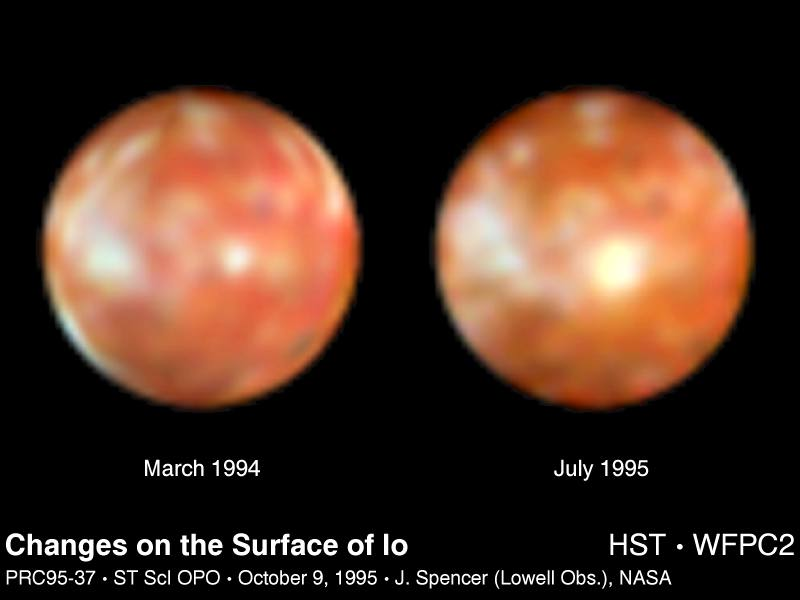

Changes on the Surface of Io

This Hubble Space Telescope pair of images of Jupiter's volcanic moon Io shows the surprising emergence of a 200-mile diameter large yellowish-white feature near the center of the moon's disk (photo on the right). This is a more dramatic change in 16 months than any seen over the previous 15 years, say researchers.

For comparison the photo on the left was taken in March 1994 -- before the spot emerged -- and shows that Io's surface had undergone only subtle changes since it was last seen close-up by the Voyager 2 probe in 1979.

Credit: J. Spencer (Lowell Observatory), and NASA/ESA